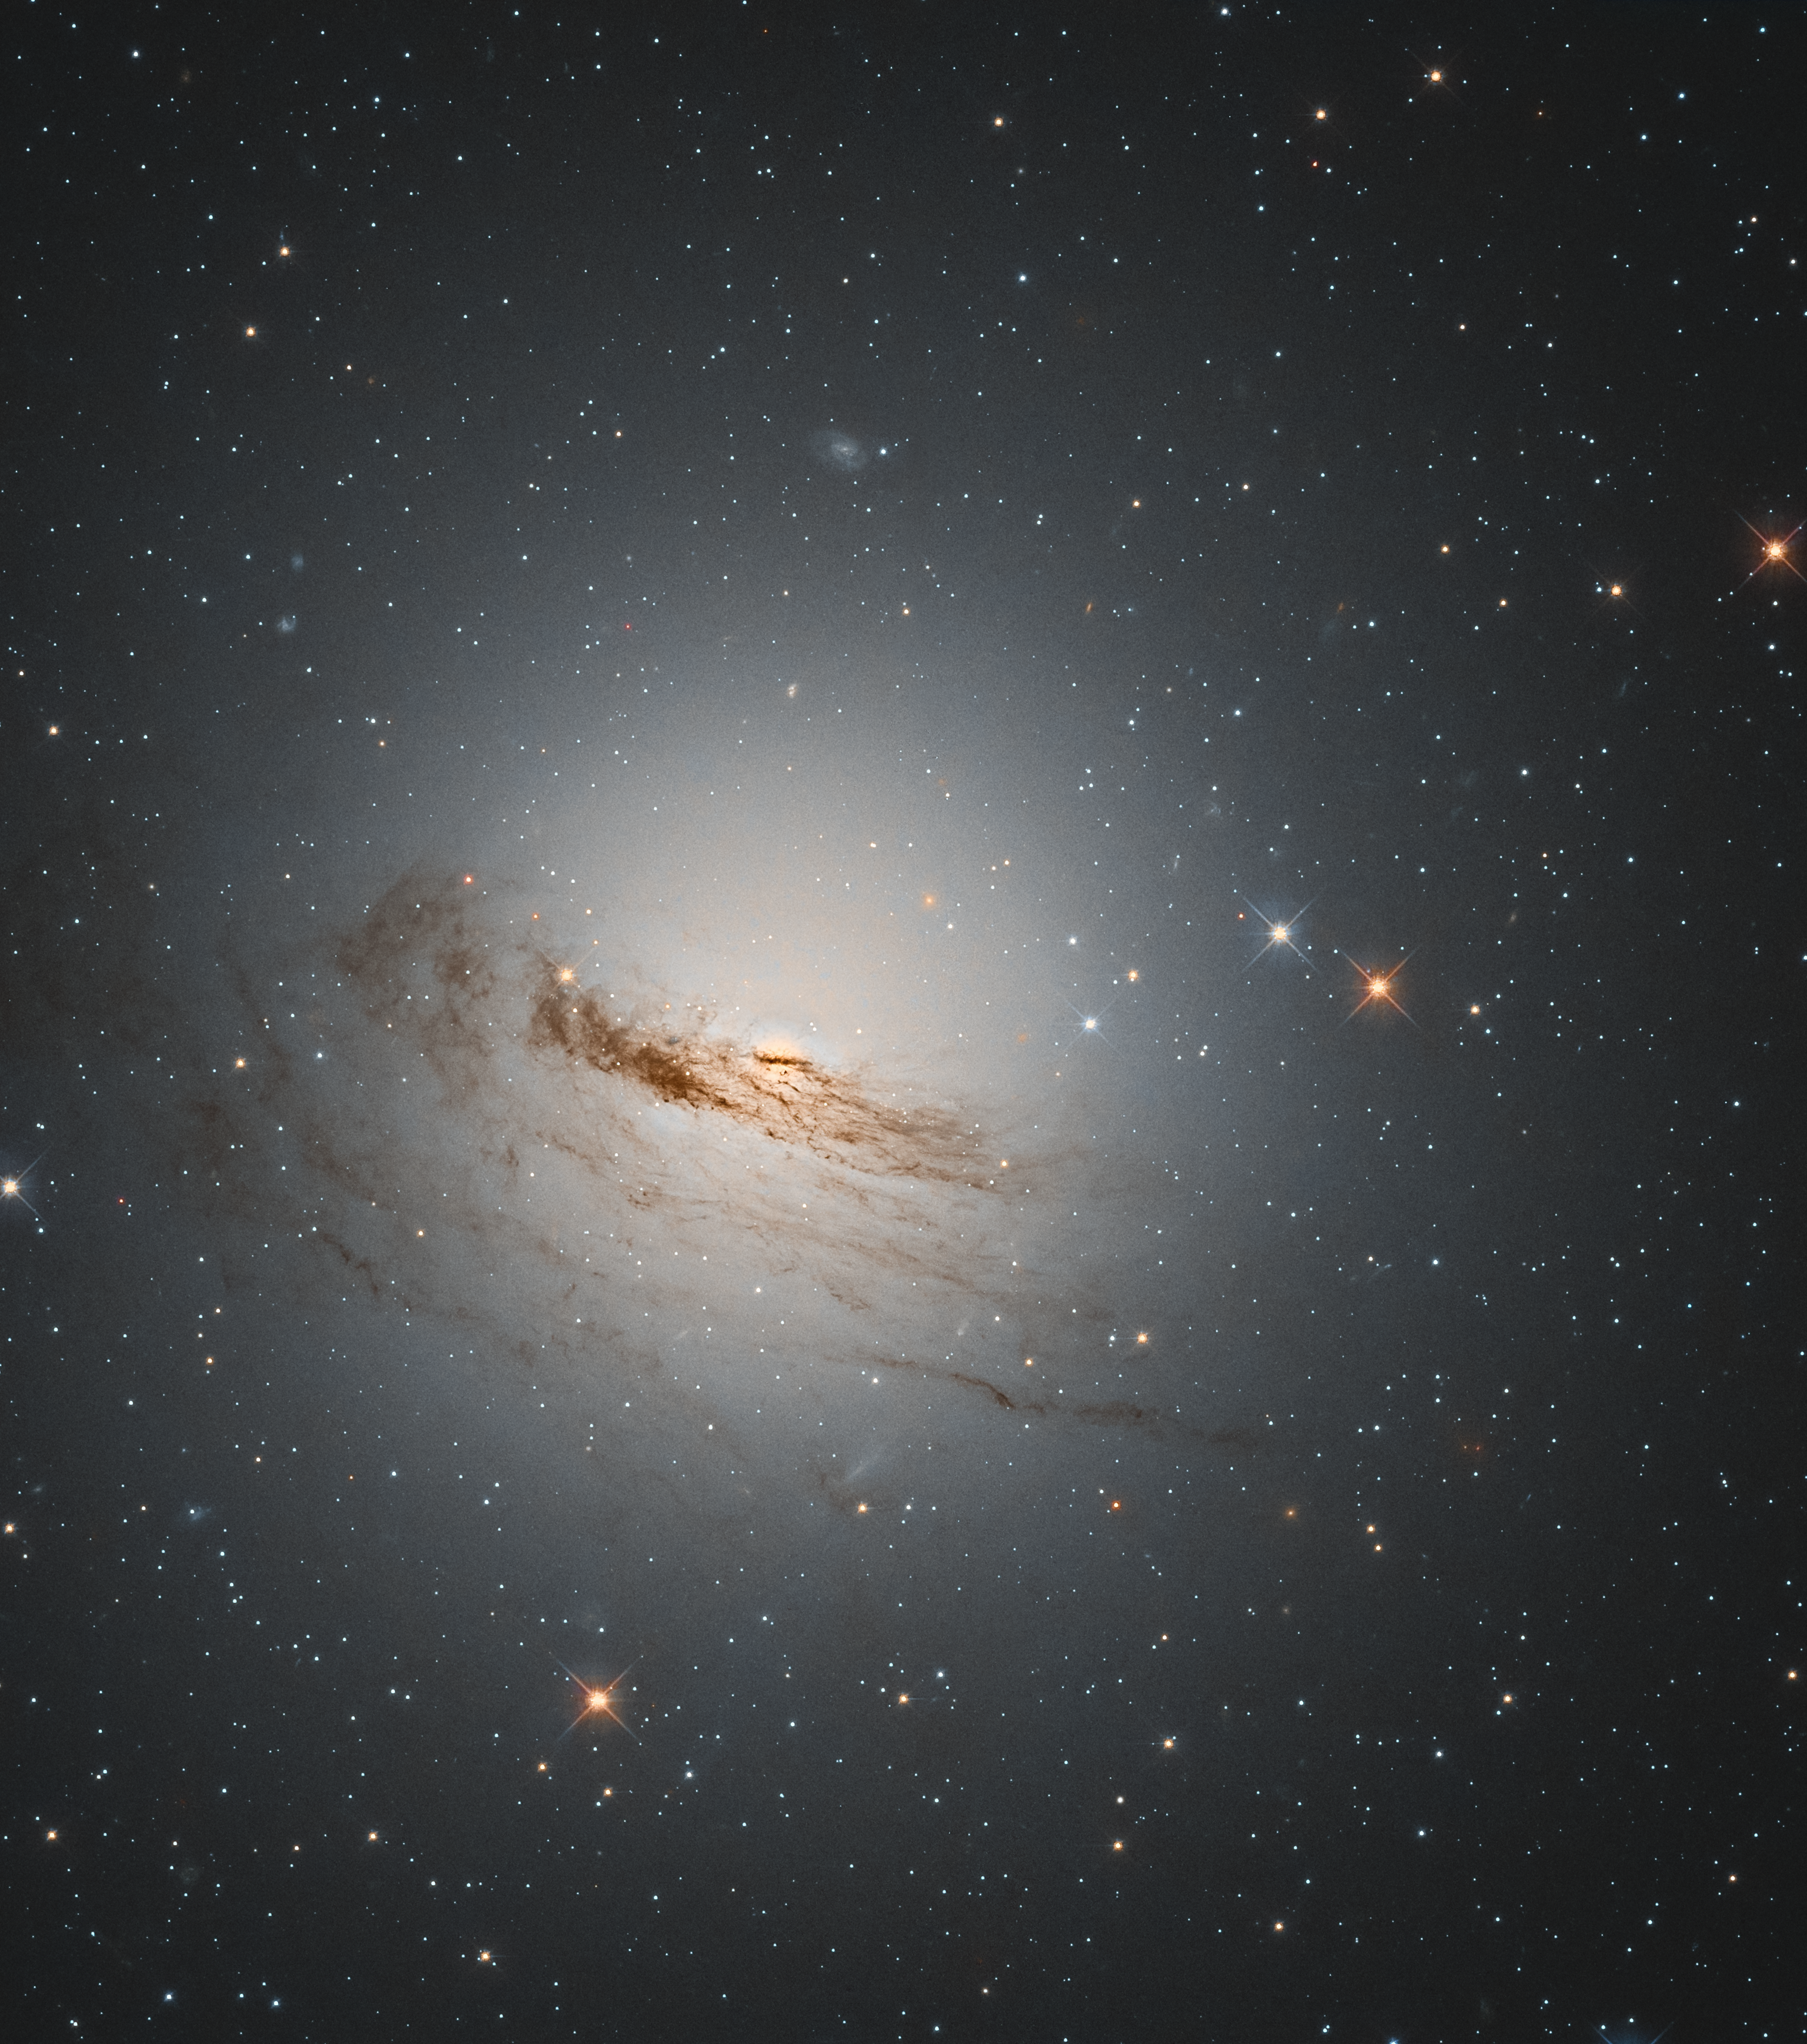

Faint Remnant Threads

This unusual lenticular galaxy, known as NGC 1947, has lost almost all the gas and dust from its signature spiral arms, which used to orbit around its centre. Discovered almost 200 years ago by James Dunlop, a Scottish-born astronomer who later studied the sky from Australia, NGC 1947 can only be seen from the southern hemisphere, in the constellation Dorado (The Dolphinfish).

Residing around 40 million light-years away from Earth, this galaxy shows off its structure by backlighting its remaining faint gas and dust disc with millions of stars. In this picture, taken with the NASA/ESA Hubble Space Telescope, the faint remnants of the galaxy’s spiral arms can still be made out in the stretched thin threads of dark gas encircling it. Without most of its star-forming material, it is unlikely that many new stars will be born within NGC 1947, leaving this galaxy to continue fading with time.

Credit: ESA/Hubble & NASA, D. Rosario Acknowledgement: L. Shatz